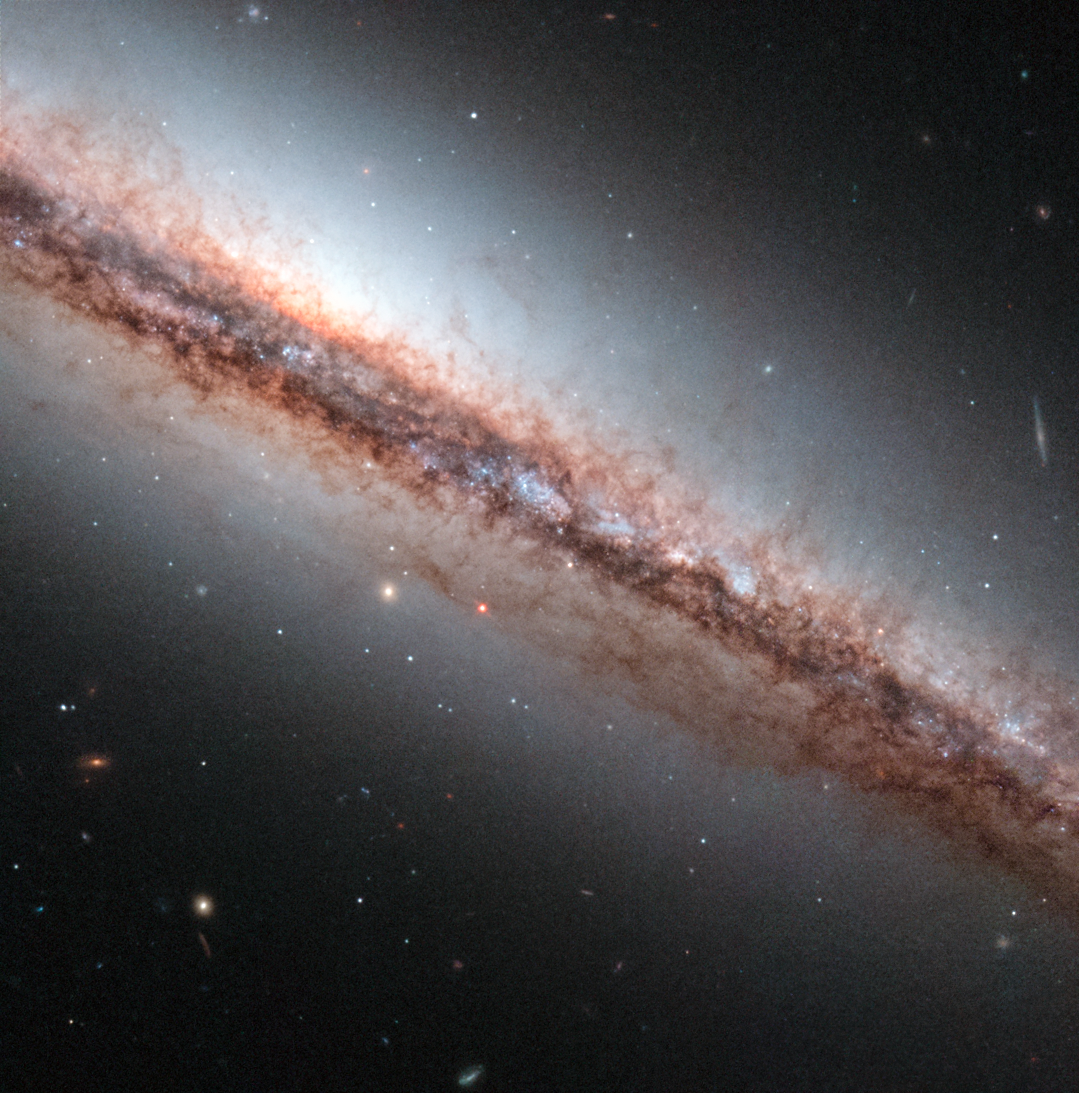

Dust filaments of NGC 4217

In this image the NASA/ESA Hubble Space Telescope takes a close look at the spiral galaxy NGC 4217, 60 million light-years away. The galaxy is seen almost perfectly edge on and is a perfect candidate for studying the nature of extraplanar dust structures — the patterns of gas and dust above and below the plane on the galaxy, seen here as brown wisps coming off NGC 4217.

These tentacle-like filaments are visible in the Hubble image only because the contrast with their surroundings is so high. This implies that the structures are denser than their surroundings. The image shows dozens of dust structures some of which reach as far as 7000 light-years away from the central plane. Typically the structures have a length of about 1000 light-years and are about 400 light-years in width.

Some of the dust filaments are round or irregular clouds, others are vertical columns, looplike structures or vertical cones. These structures can help astronomers to identify the mechanisms responsible for the ejection of gas and dust from the galactic plane of spiral galaxies and reveal information on the transport of the interstellar medium to large distances away from galactic discs.

The properties of the observed dust structures in NGC 4217 suggest that the gas and dust was driven out of the midplane of the galaxy by powerful stellar winds resulting from supernovae — explosions that mark the deaths of massive stars.

This image was entered into the Hubble Hidden Treasures competition by contestant Ralf Schoofs.

Credit: ESA/Hubble & NASA Acknowledgement: R. Schoofs